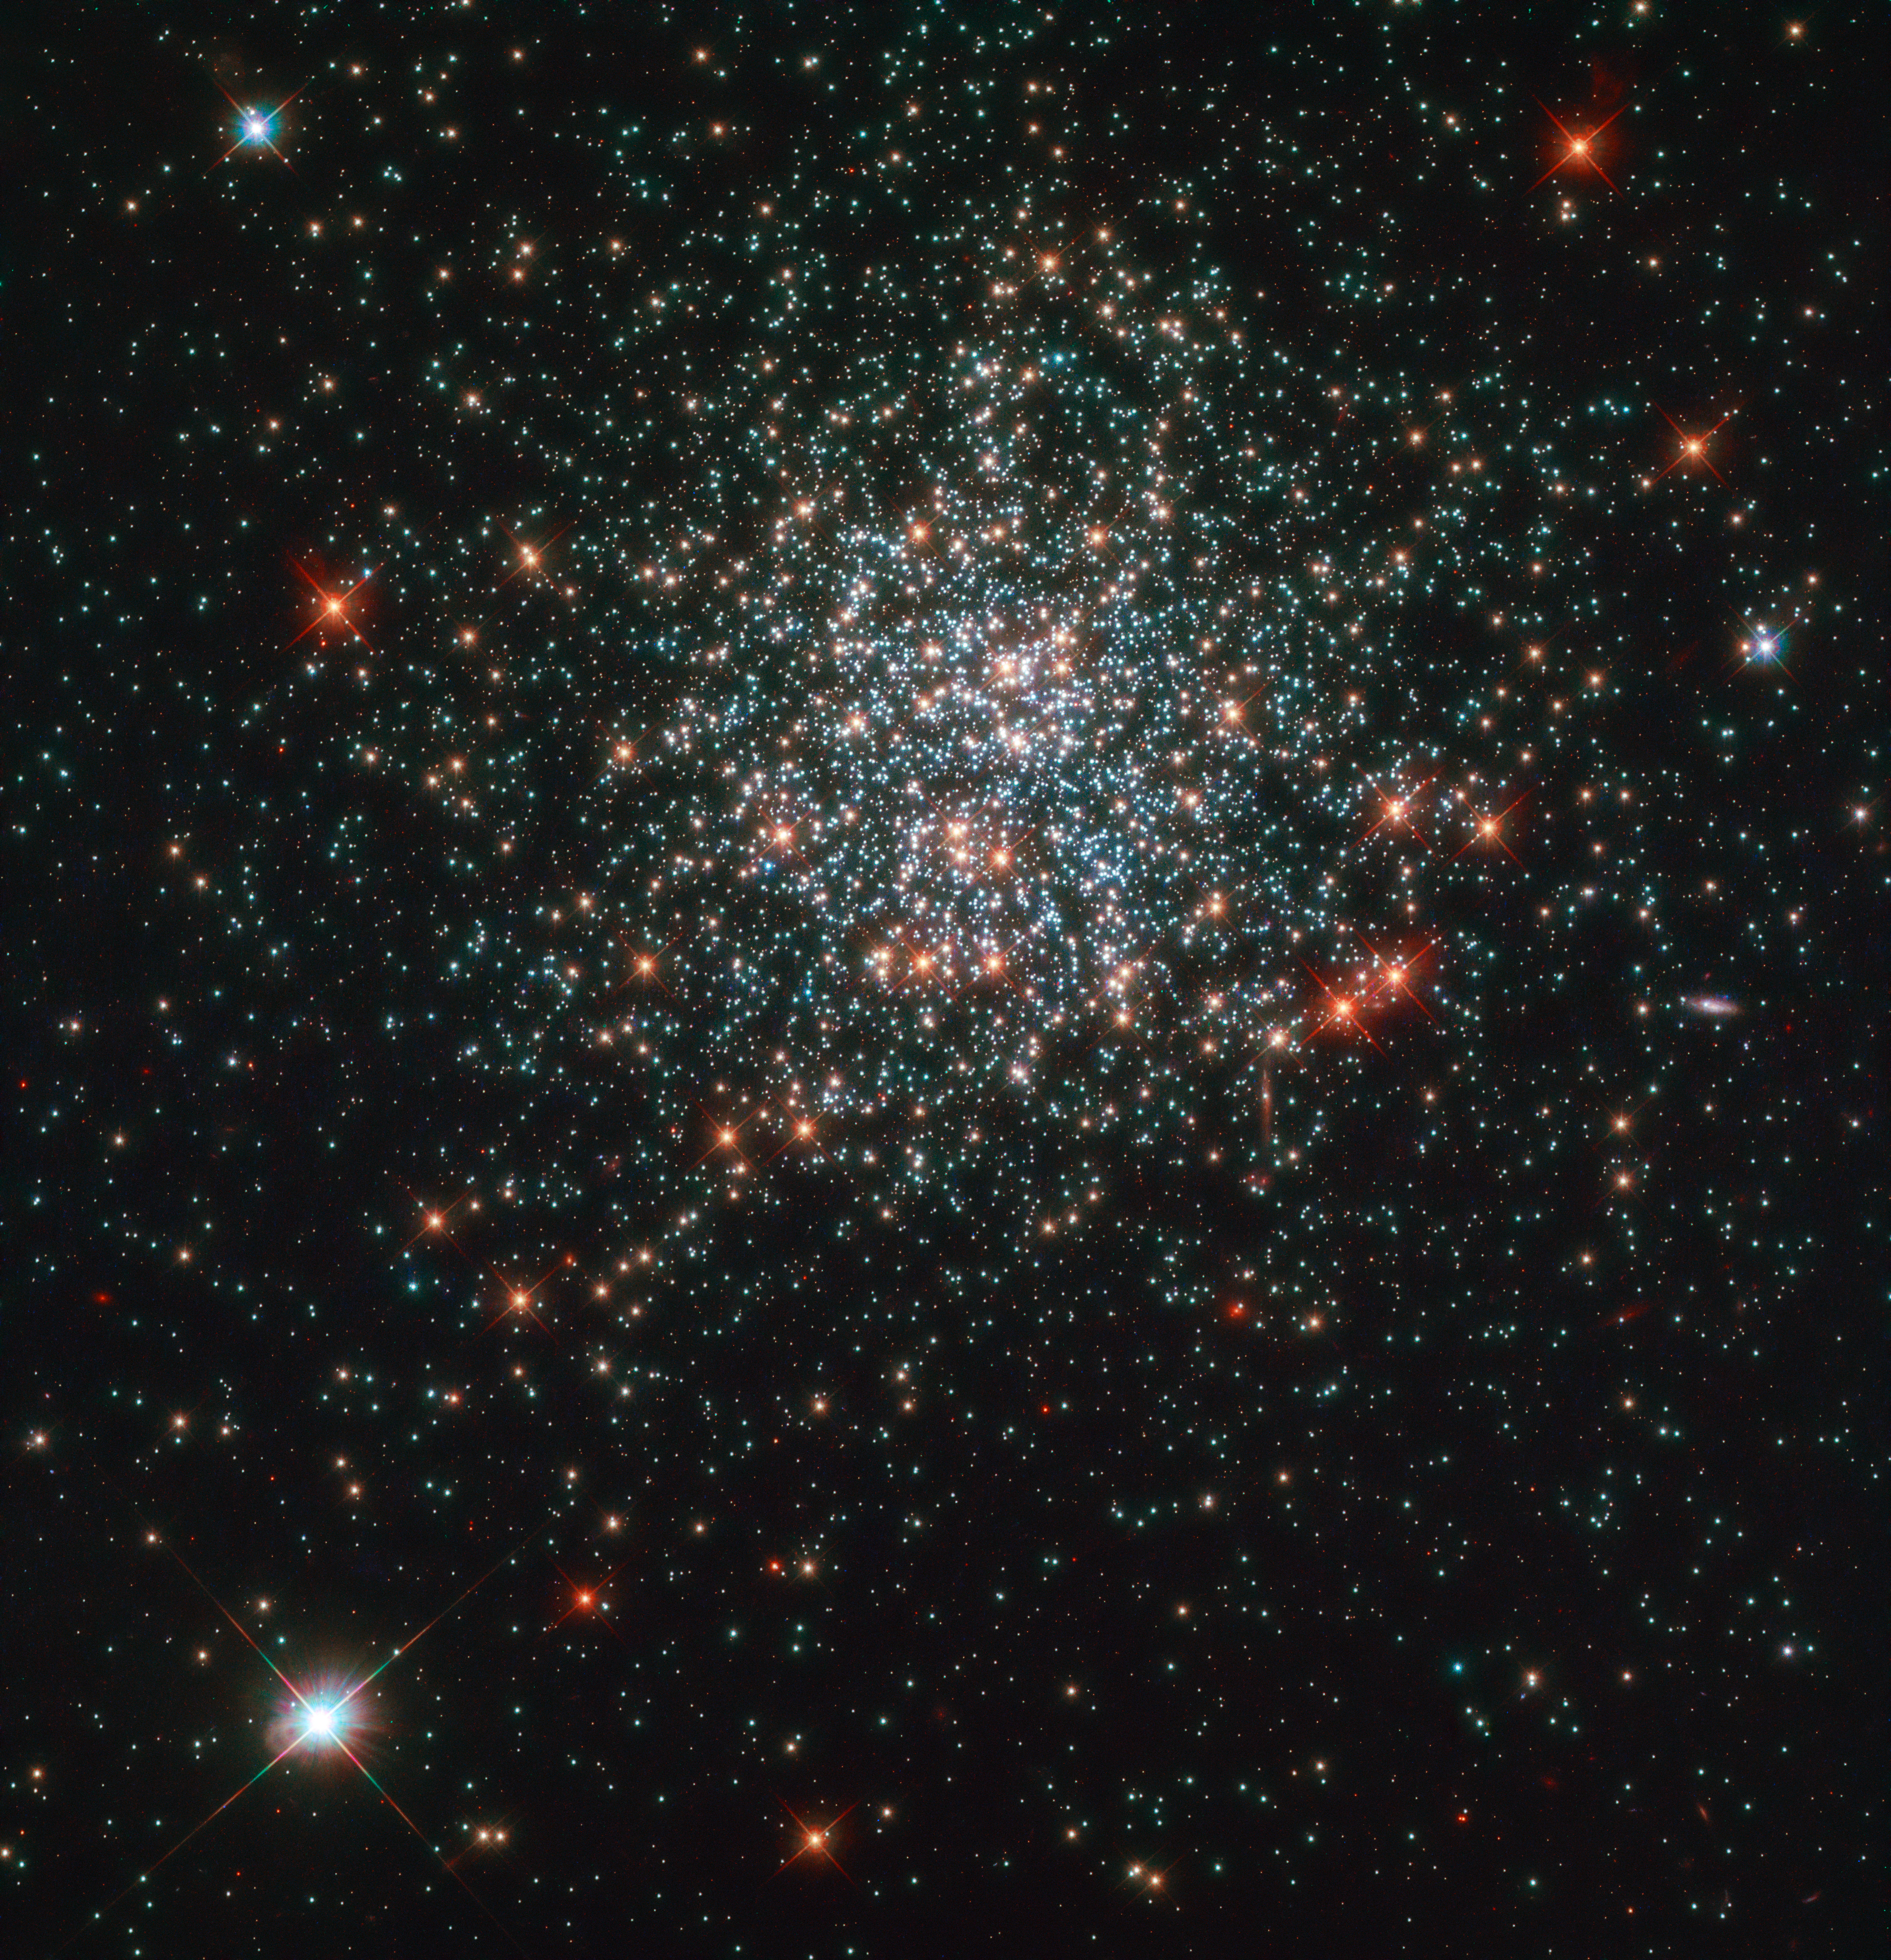

Stellar Sweet Shop

Looking its best ever is the star cluster NGC 2203, here imaged by the NASA/ESA Hubble Space Telescope. Aside from its dazzling good looks, this cluster of stars contains lots of astronomical treats that have helped astronomers puzzle together the lifetimes of stars.

A main sequence star, like our Sun, is the term applied to a star during the longest period of its life, when it burns fuel steadily. Our Sun’s fuel will run out in approximately 6 billion years, and it will then move on to the next stage of its life when it will turn into a red giant. Astronomers studying NGC 2203, which contains stars that are roughly twice as massive as our Sun, found that their rotation might be a factor as to why some of the stars stay longer than usual in this main-sequence phase of their life.

This is the best resolution obtained of the star cluster to date.

Credit: ESA/Hubble & NASA, L. Girardi